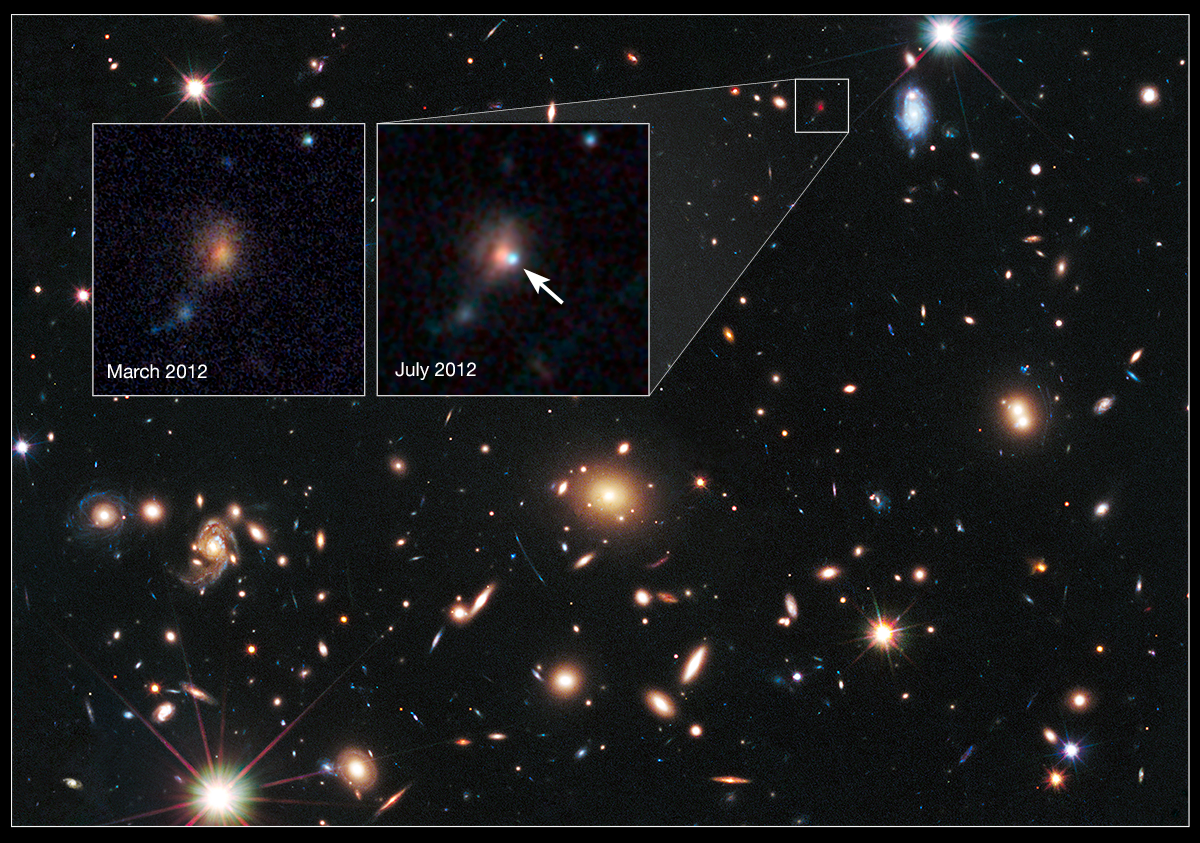

Cosmic lens MACS J1720+35 helps Hubble to find a distant supernova (annotated)

The heart of a vast cluster of galaxies called MACSJ1720+35 is shown in this image, taken in visible and near-infrared light by the NASA/ESA Hubble Space Telescope.

The galaxy cluster is so massive that its gravity distorts, brightens, and magnifies light from more distant objects behind it, an effect called gravitational lensing. The small white box at upper right marks the location of an exploding star, located behind the cluster.

An enlarged view of the supernova, nicknamed Caracalla, is shown in the furthest right of the two inset images, taken in July 2012. An arrow marks the location of the supernova, which resides near the bright core of the host galaxy. The supernova is seen as it appeared 7.7 billion years ago. The image was taken in near-infrared light with Hubble's Wide Field Camera 3.

The inset image on the left, taken in March 2012, shows the same region before the supernova blast. Astronomers combined observations taken in visible and near-infrared light with Hubble's Advanced Camera for Surveys and Wide Field Camera 3 to make the image. The supernova is a member of a special class of exploding star called Type Ia, prized by astronomers because it provides a consistent level of peak brightness that makes it reliable for making distance estimates.

Finding a gravitationally lensed Type Ia supernova gives astronomers a unique opportunity to check the optical "prescription" of the foreground lensing cluster. The supernova is one of three exploding stars discovered in the Cluster Lensing And Supernova survey with Hubble (CLASH), and was followed up as part of a Supernova Cosmology Project HST program. CLASH is a Hubble census that probed the distribution of dark matter in 25 galaxy clusters. Dark matter cannot be seen directly but is believed to make up most of the universe's matter.

The image of the galaxy cluster was taken between March and June 2012 by Hubble's Wide Field Camera 3 and Advanced Camera for Surveys.

Credit: NASA, ESA, S. Perlmutter (UC Berkeley, LBNL), A. Koekemoer (STScI), M. Postman (STScI), A. Riess (STScI/JHU), J. Nordin (LBNL, UC Berkeley), D. Rubin (Florida State), and C. McCully (Rutgers University)